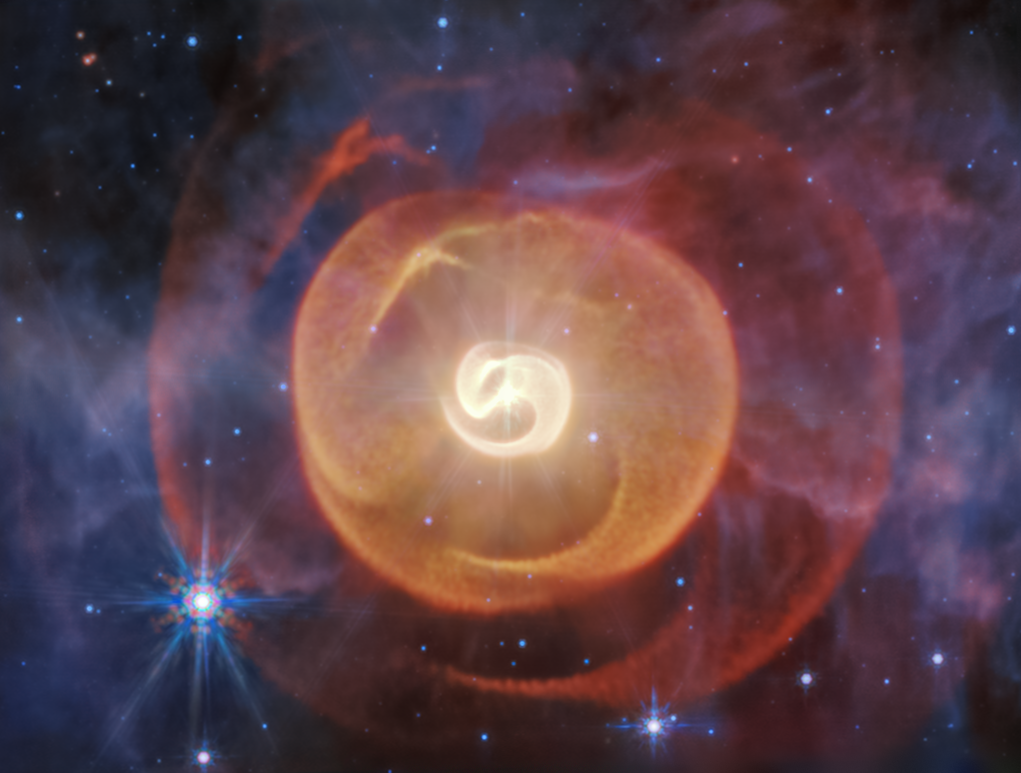

Wolf-Rayet Apep (MIRI Image)

This NASA/ESA/CSA James Webb Space Telescope’s mid-infrared image shows four coiled shells of dust around a pair of Wolf-Rayet stars known as Apep for the first time. Previous observations by other telescopes showed only one.

Webb’s data, combined with observations from the European Southern Observatory’s Very Large Telescope (VLT) in Chile, confirmed that the two Wolf-Rayet stars sail past one another approximately every 190 years. Over each orbit, they make a close pass for 25 years, producing and spewing amorphous carbon dust.

Webb’s new data also confirmed that there are three stars gravitationally bound to one another in this system. Holes are “sliced” into these shells by the third star, a massive supergiant.

Learn more about this result here.

Credit: NASA, ESA, CSA, STScI, Y. Han (Caltech), R. White (Macquarie University), A. Pagan (STScI)